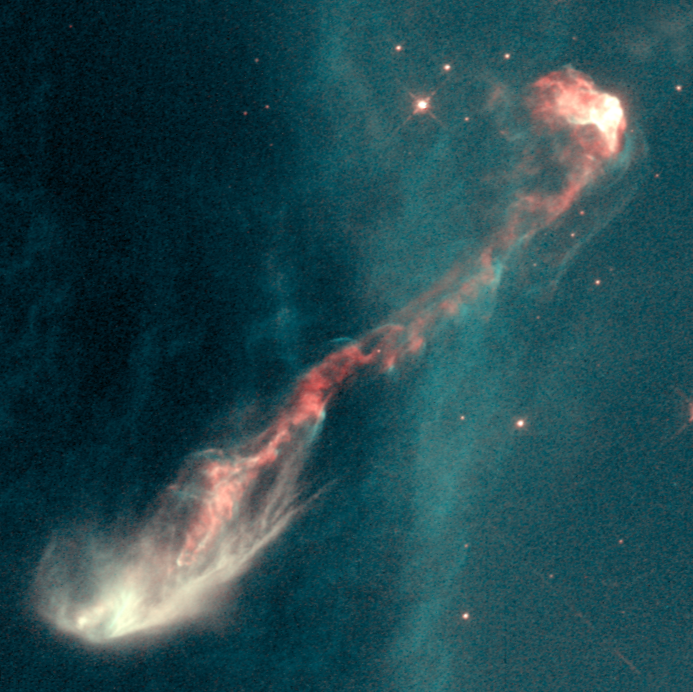

Jet from young star (HH-47)

This view of a three trillion mile-long jet called HH-47 reveals a very complicated jet pattern that indicates the star (hidden inside a dust cloud near the left edge of the image) might be wobbling, possibly caused by the gravitational pull of a companion star.

Credit: J. Morse/STScI, and NASA/ESA